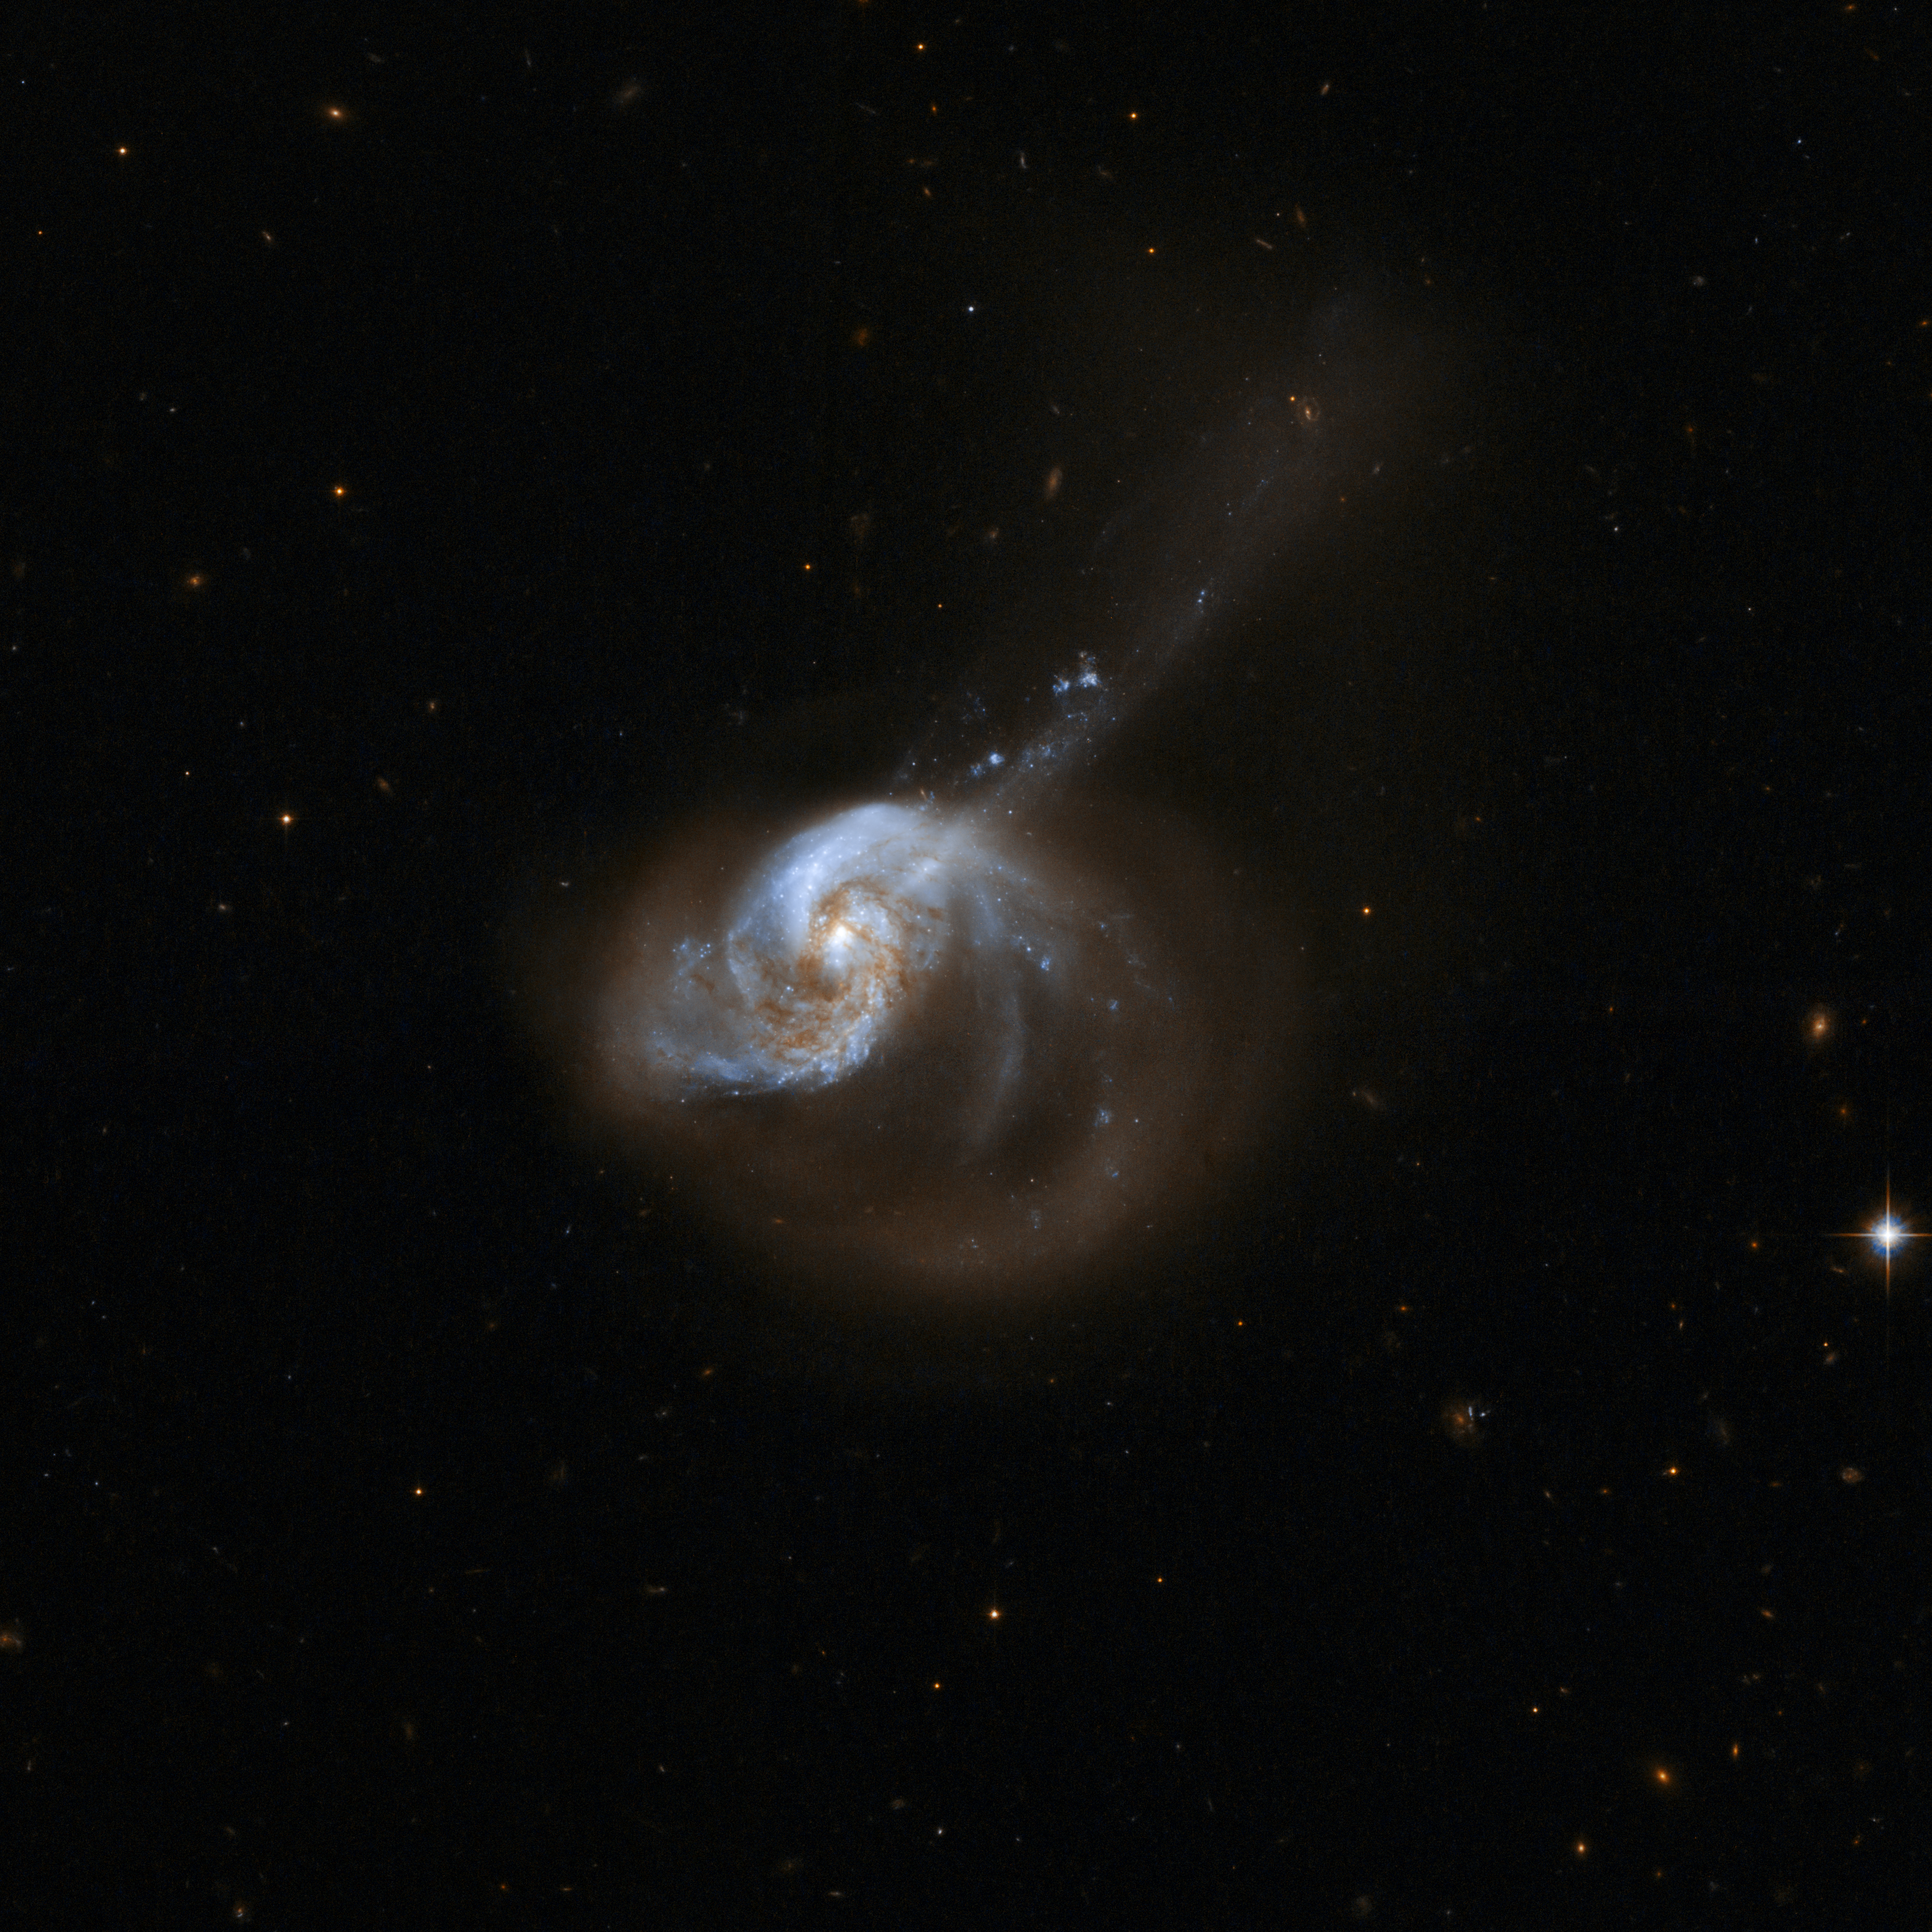

NGC 1614

The galaxy system NGC 1614 has a bright optical centre and two clear inner spiral arms that are fairly symmetrical. It also has a spectacular outer structure that consists principally of a large one-sided curved extension of one of these arms to the lower right, and a long, almost straight tail that emerges from the nucleus and crosses the extended arm to the upper right. The galaxy appears to be the result of a tidal interaction and the resulting merger of two predecessor systems.

The system has a nuclear region of quasar-like luminosity, but shows no direct evidence for an active nucleus. It is heavily and unevenly reddened across its nucleus, while infrared imaging also shows a "ridge" of dust. The linear "tail" to the upper right and extended arms to the lower right are likely the remains of an interacting companion and the tidal plume(s) caused by the collision. NGC 1614 is located about 200 million light-years away from Earth in the constellation of Eridanus, the River.

This image is part of a large collection of 59 images of merging galaxies taken by the Hubble Space Telescope and released on the occasion of its 18th anniversary on 24th April 2008.

Credit: NASA, ESA, the Hubble Heritage Team (STScI/AURA)-ESA/Hubble Collaboration and A. Evans (University of Virginia, Charlottesville/NRAO/Stony Brook University)